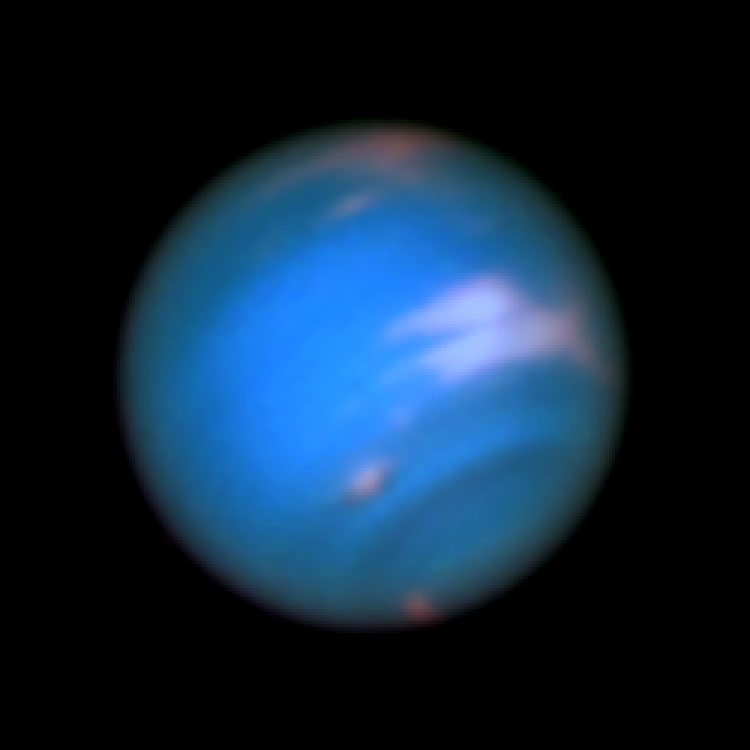

Neptune (full colour)

This new image taken with the NASA/ESA Hubble Space Telescope confirms the presence of a dark vortex in the atmosphere of Neptune. The full visible-light image at left shows that the dark feature resides near and below a patch of bright clouds in the planet's southern hemisphere. The dark spot measures roughly 4,800 kilometers across. Other high-altitude clouds can be seen at the planet's equatorial region and polar regions.

Credit: NASA, ESA, and M.H. Wong and J. Tollefson (UC Berkeley)